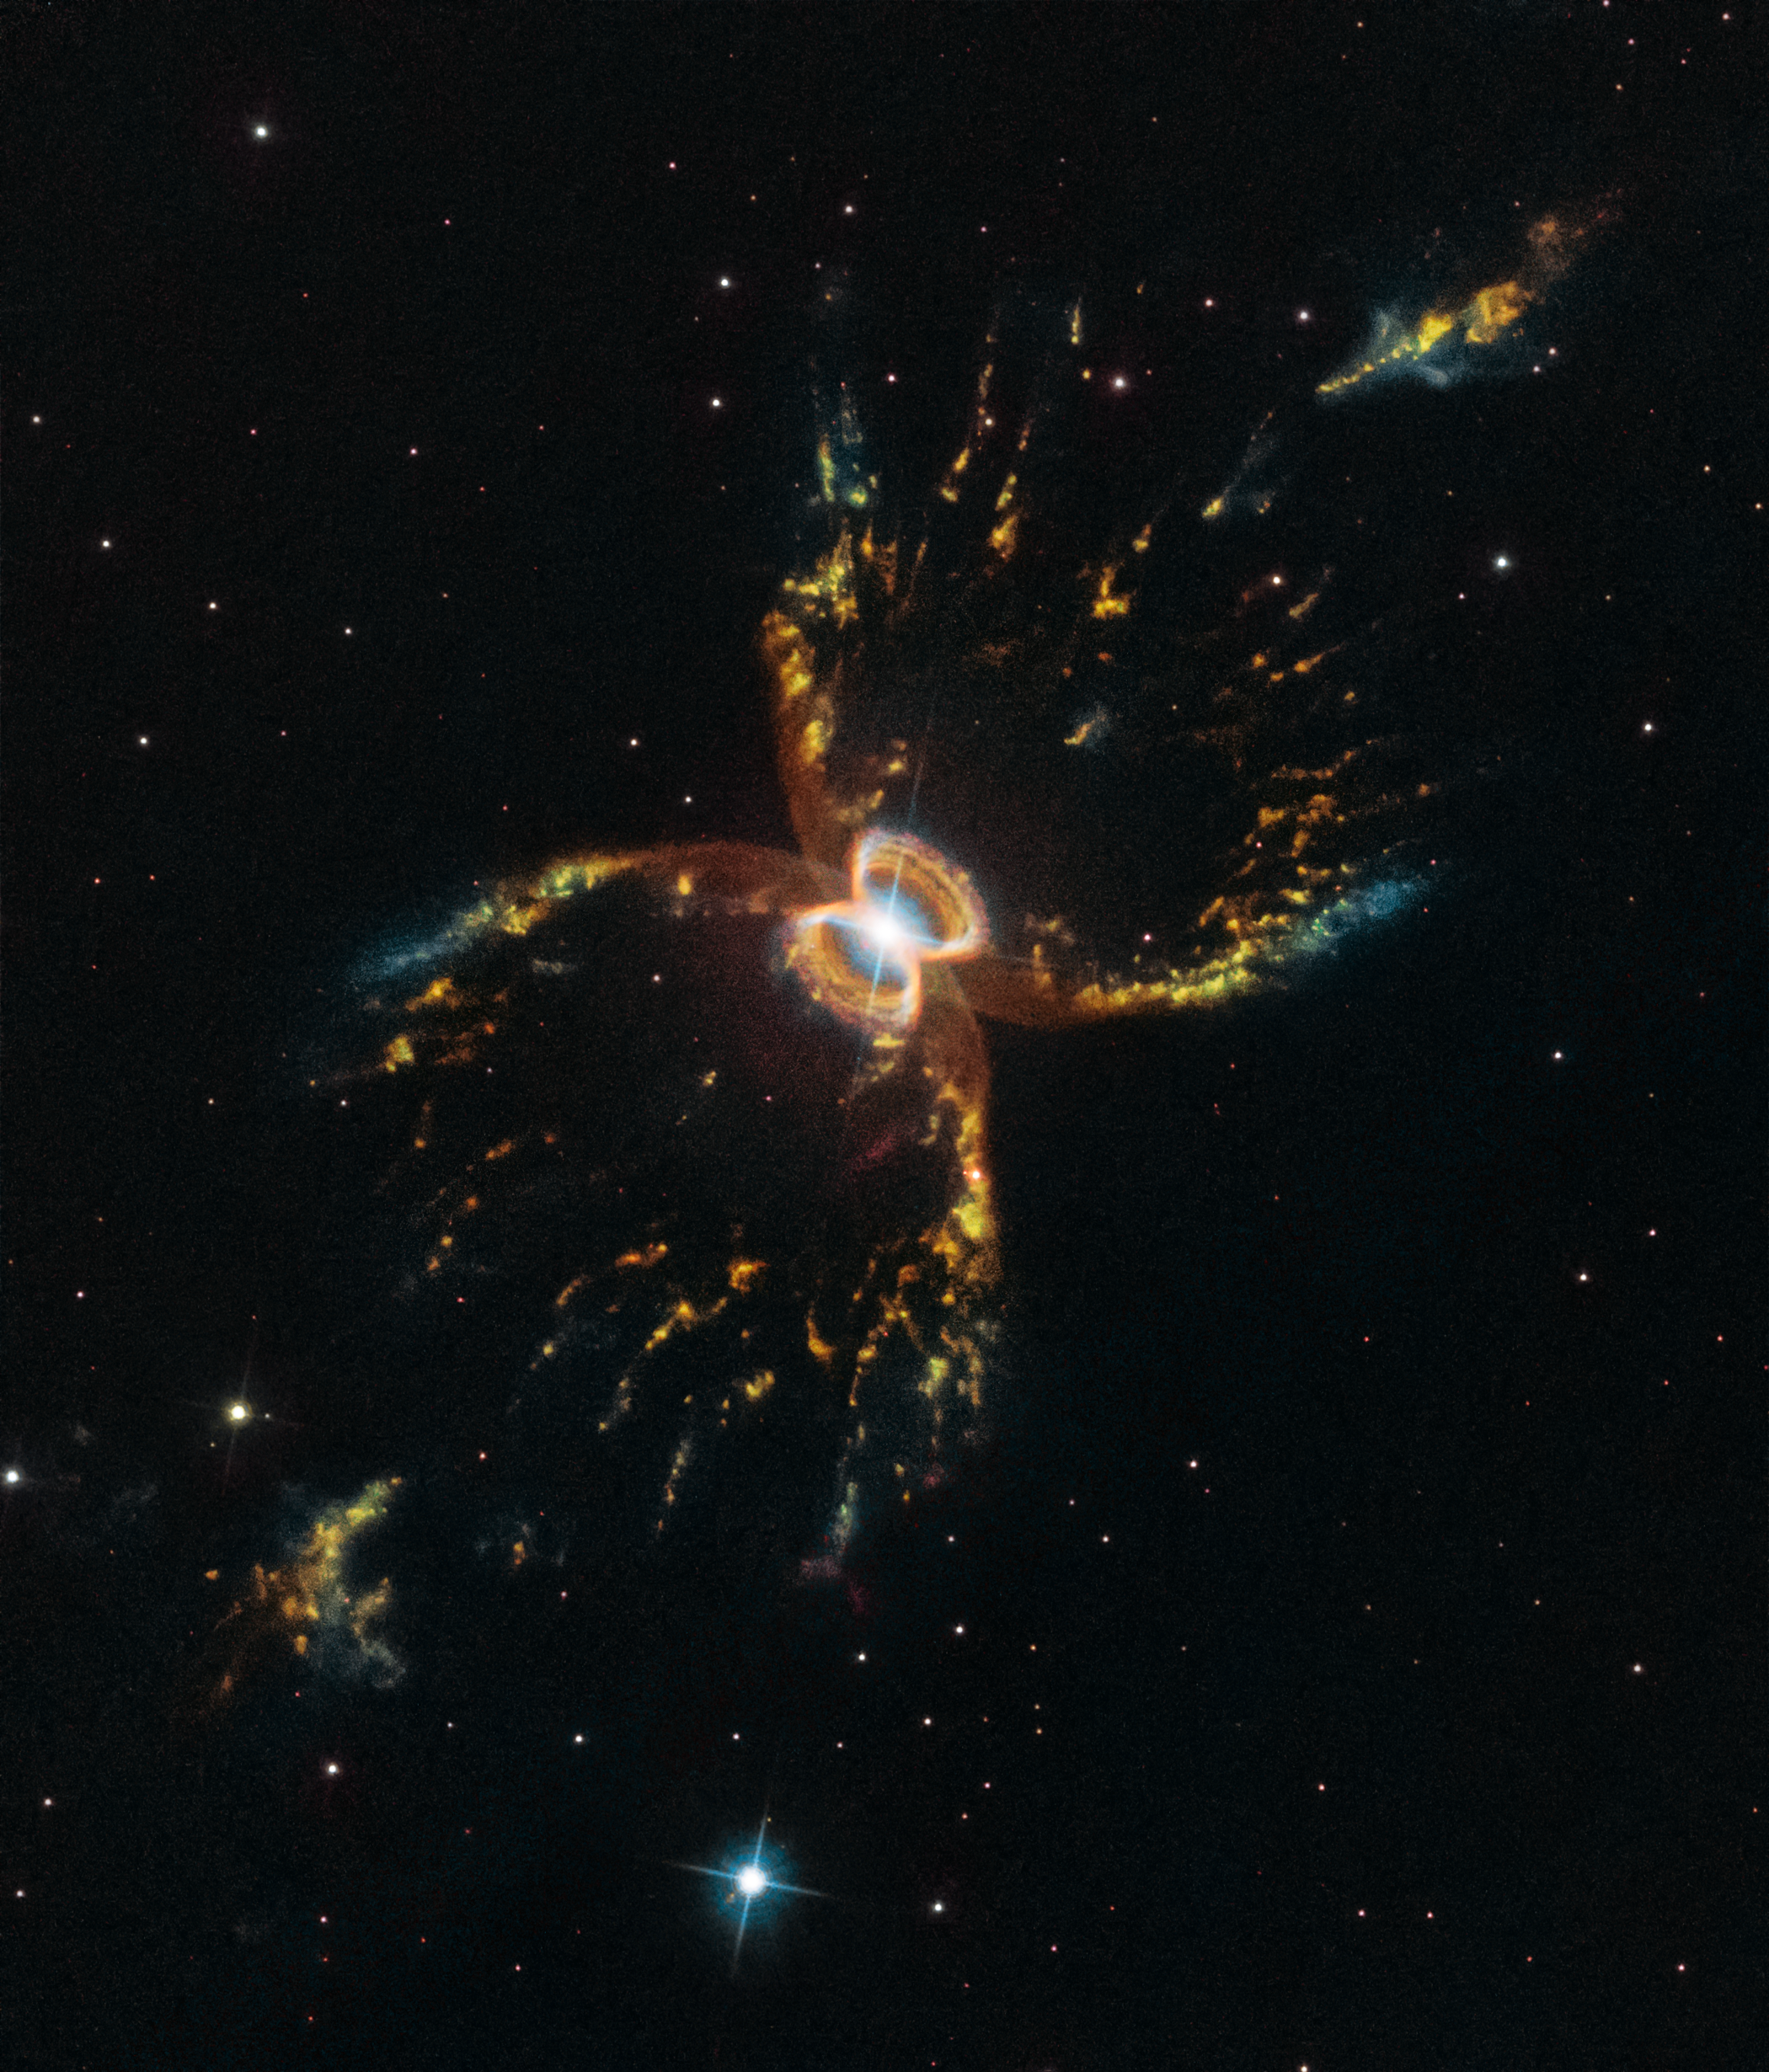

The Crab of the Southern Sky

The Southern Crab Nebula — Hubble’s 29th anniversary image.

Credit: NASA, ESA, and STScI